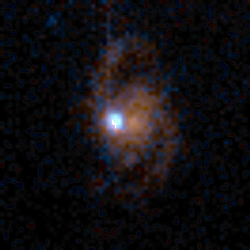

Medium Deep Survey Galaxy

Image of a normal spiral galaxy taken by the Wide Field Planetary Camera 2 (WFPC2) installed on the Hubble Space Telescope (HST). The object is estimated to be at a distance of 5 to 7 billion light-years from Earth.

Credit: Richard Griffiths (JHU) and NASA